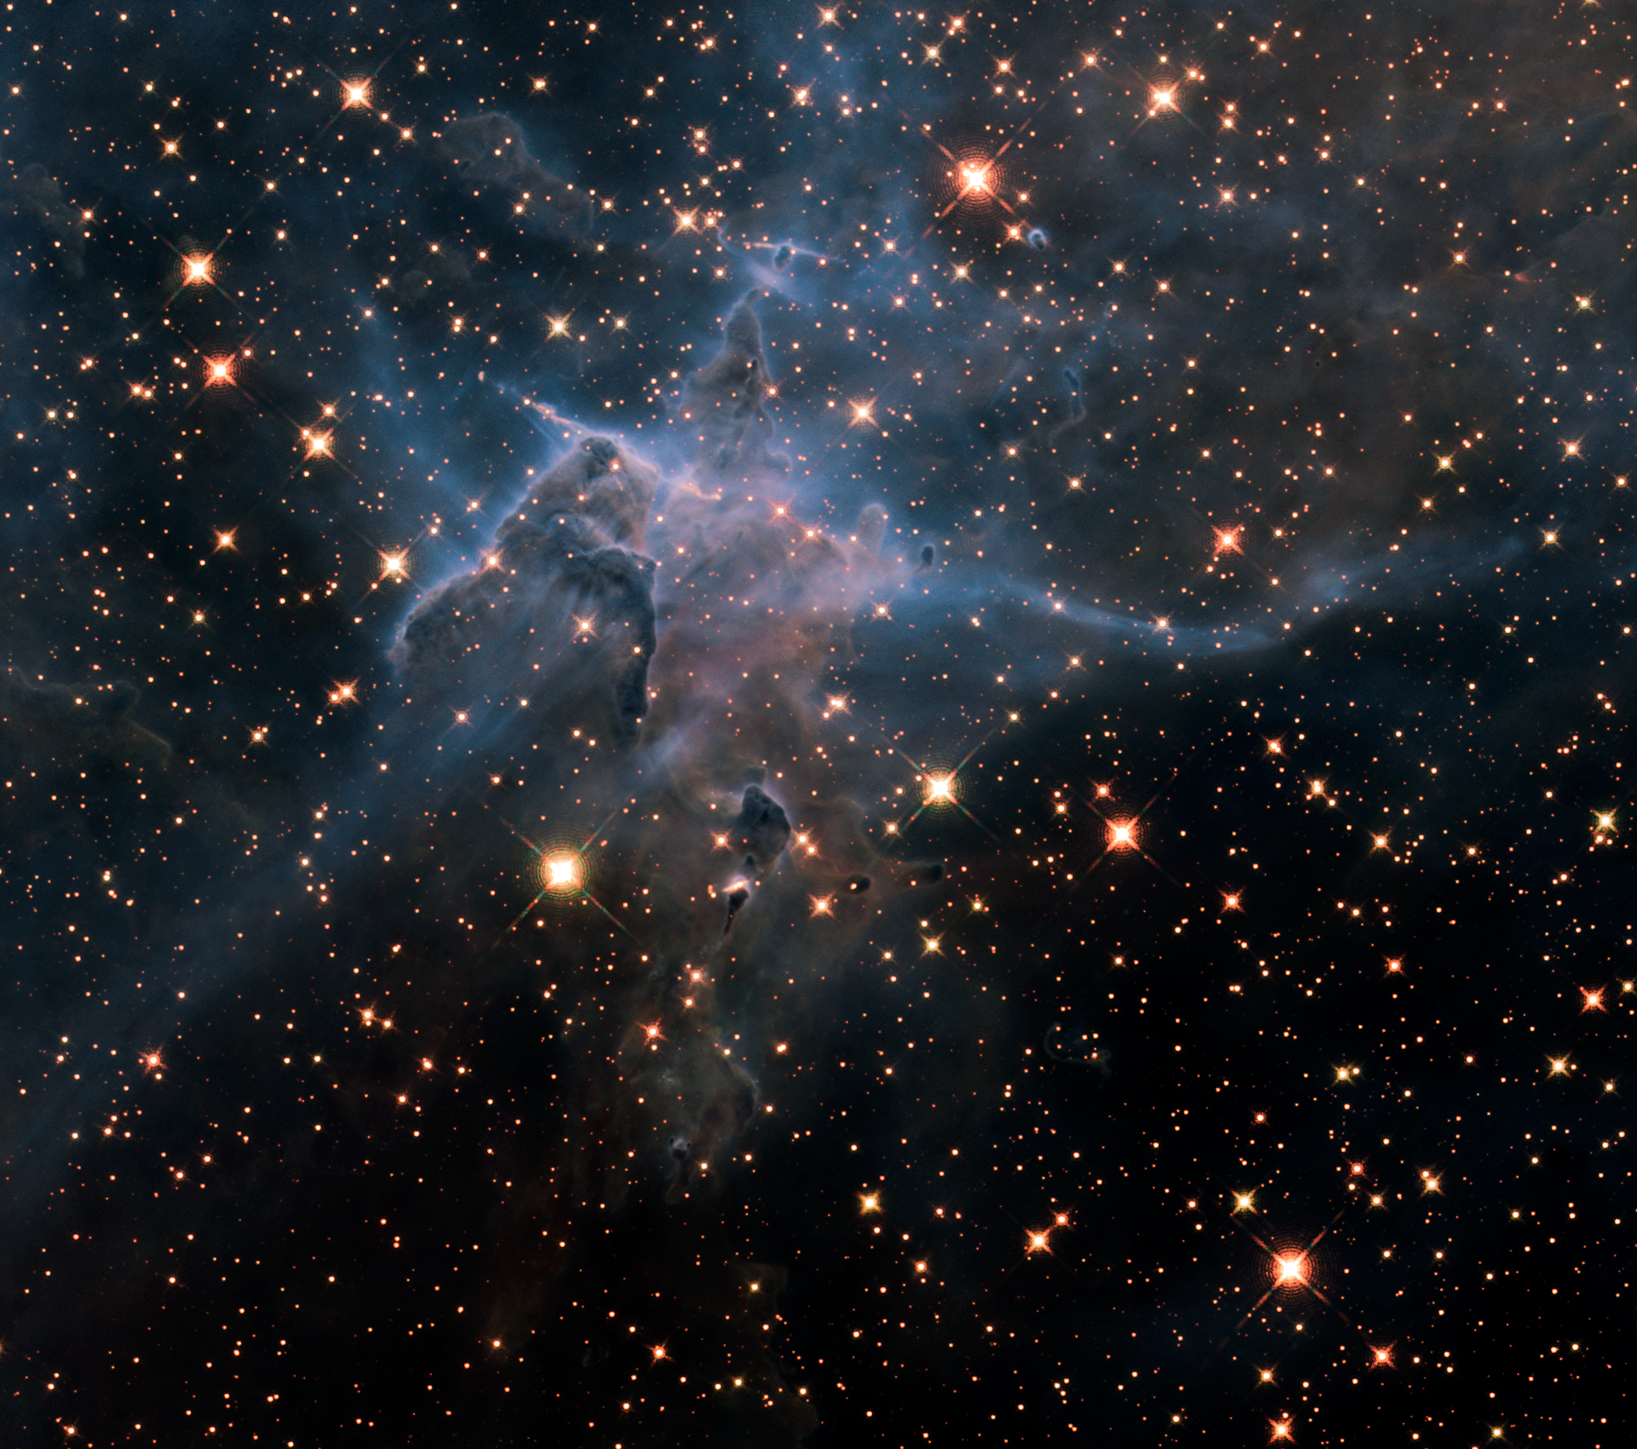

Hubble’s wide view of “Mystic Mountain” in the infrared

This is a NASA Hubble Space Telescope near-infrared image of a pillar of gas and dust, three light-years tall, that is being eaten away by the brilliant light from nearby stars in the tempestuous stellar nursery called the Carina Nebula, located 7500 light-years away in the southern constellation of Carina. The image marks the 20th anniversary of Hubble's launch and deployment into an orbit around Earth.

The image reveals a myriad of stars behind the gaseous veil of the nebula’s wall of hydrogen, laced with dust. The foreground pillar becomes semi-transparent because infrared light from background stars penetrates through much of the dust. A few stars inside the pillar also become visible. The false colours are assigned to three different infrared wavelength ranges.

Hubble’s Wide Field Camera 3 observed the pillar in February/March 2010.

Credit: NASA, ESA, M. Livio and the Hubble 20th Anniversary Team (STScI)